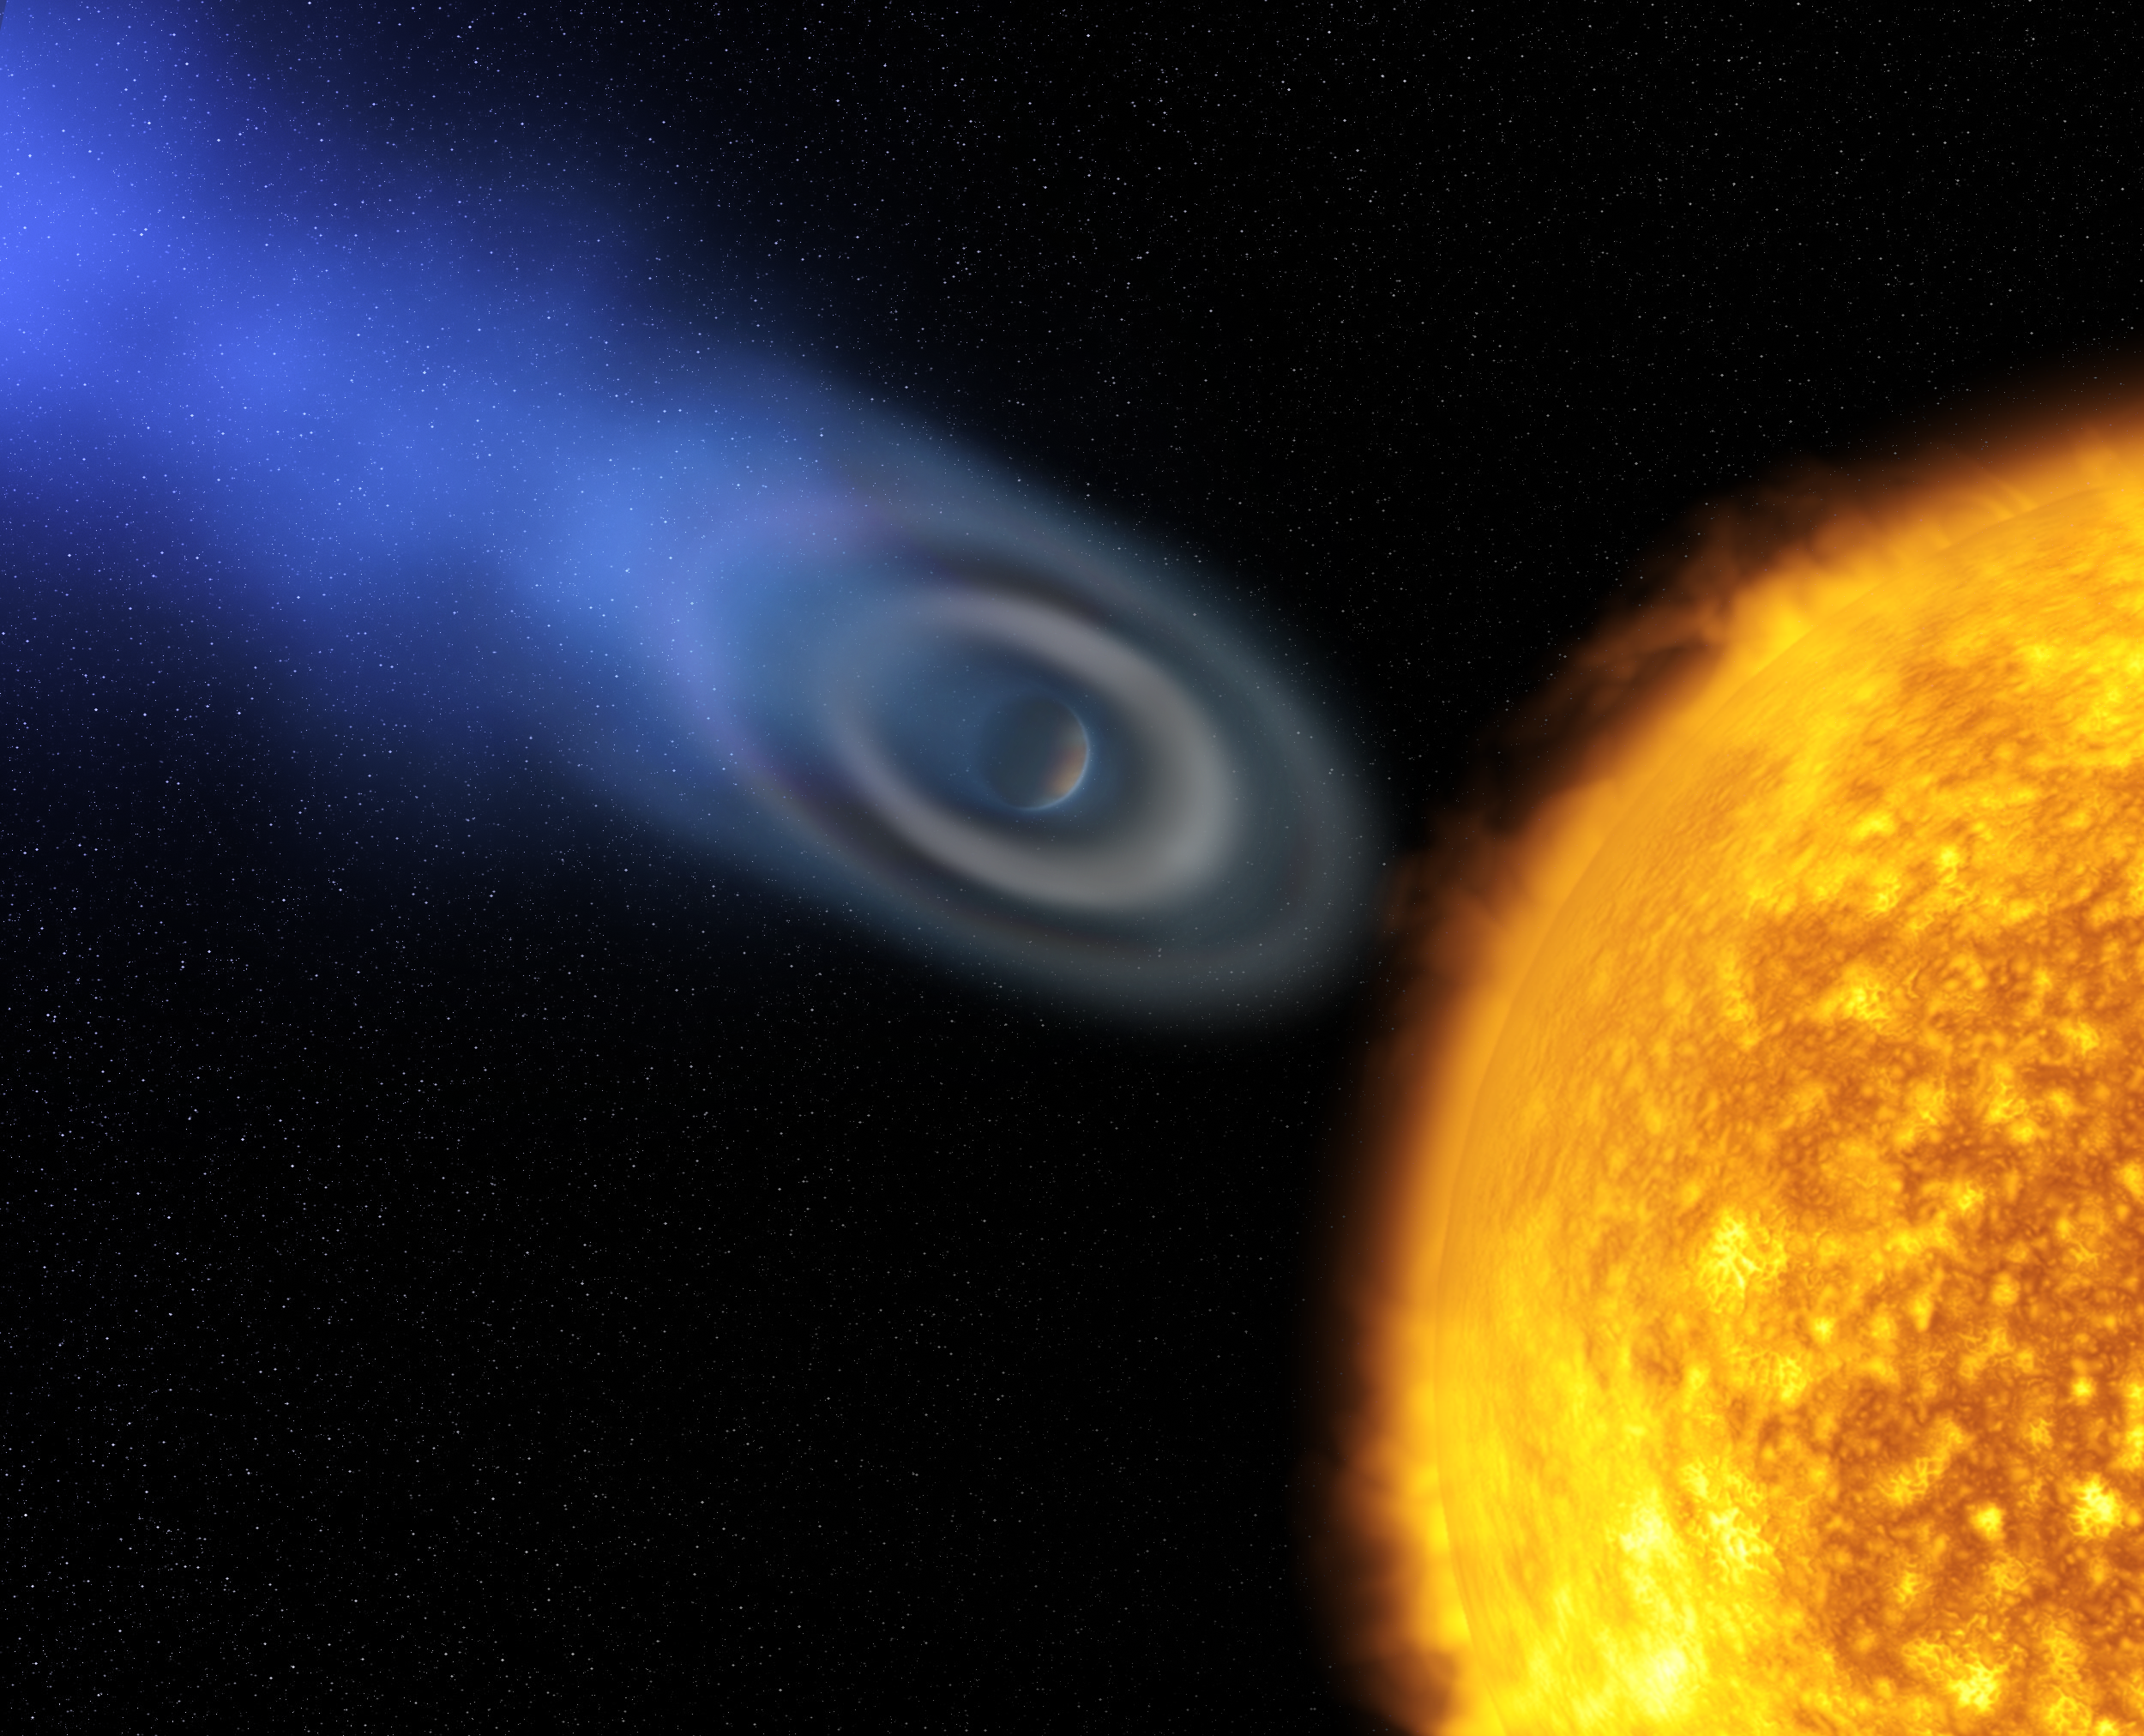

Oxygen and carbon discovered in extrasolar planet atmosphere "blow-off" [artist's impression]

This artist's impression shows an extended ellipsoidal envelope - the shape of a rugby-ball - of oxygen and carbon discovered around the well-known extrasolar planet HD 209458b.

An international team of astronomers led by Alfred Vidal-Madjar (Institut d'Astrophysique de Paris, CNRS, France) observed the first signs of oxygen and carbon in the atmosphere of a planet beyond our Solar System for the first time using the NASA/ESA Hubble Space Telescope.

The atoms of carbon and oxygen are swept up from the lower atmosphere with the flow of escaping atmospheric atomic hydrogen - like dust in a supersonic whirlwind - in a process called atmospheric "blow off".

Credit: European Space Agency and Alfred Vidal-Madjar (Institut d'Astrophysique de Paris, CNRS, France)